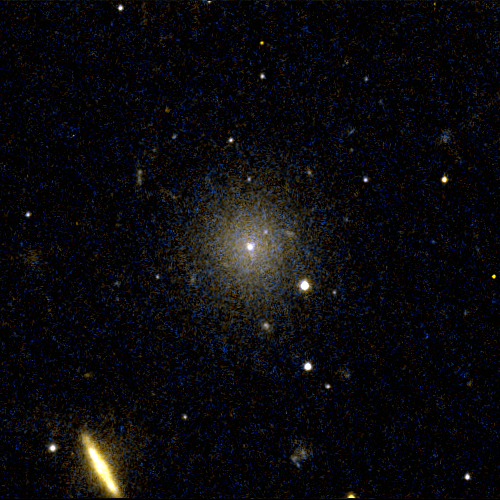

Perseus Dwarf Galaxy

This object, [CGW2003] J031905.2+4134, is one of four dwarf galaxies that is part of a census of small galaxies in the tumultuous heart of the nearby Perseus galaxy cluster.

The galaxies appear smooth and symmetrical, suggesting that they have not been tidally disrupted by the pull of gravity in the dense cluster environment. Larger galaxies around them, however, are being ripped apart by the gravitational tug of other galaxies.

The image, taken in 2005 by NASA/ESA’s Hubble Space Telescope, is an evidence that the undisturbed galaxies are enshrouded by a "cushion" of dark matter, which protects them from their rough-and-tumble neighborhood.

Credit: NASA, ESA and C. Conselice (University of Nottingham, U.K.)